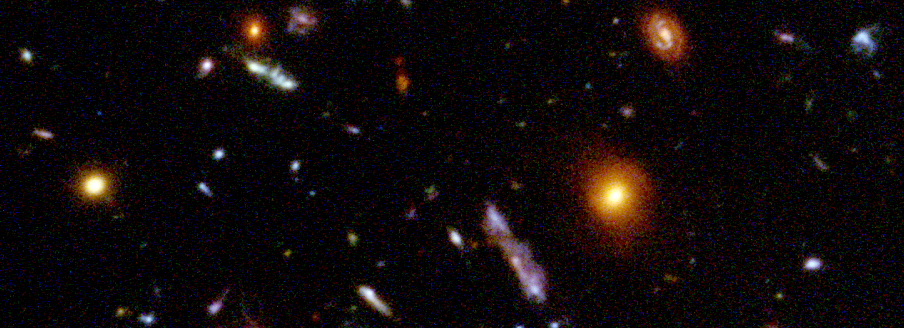

Hubble Deep Field details

Representing a narrow 'keyhole' view stretching all the way to the visible horizon of the universe, the HDF image covers a speck of sky a tiny fraction the diameter of the full Moon. This is so narrow, just a few foreground stars in our Milky Way Galaxy are visible and are vastly outnumbered by the menagerie of far more distant galaxies.

Credit: Robert Williams and the Hubble Deep Field Team (STScI) and NASA/ESA